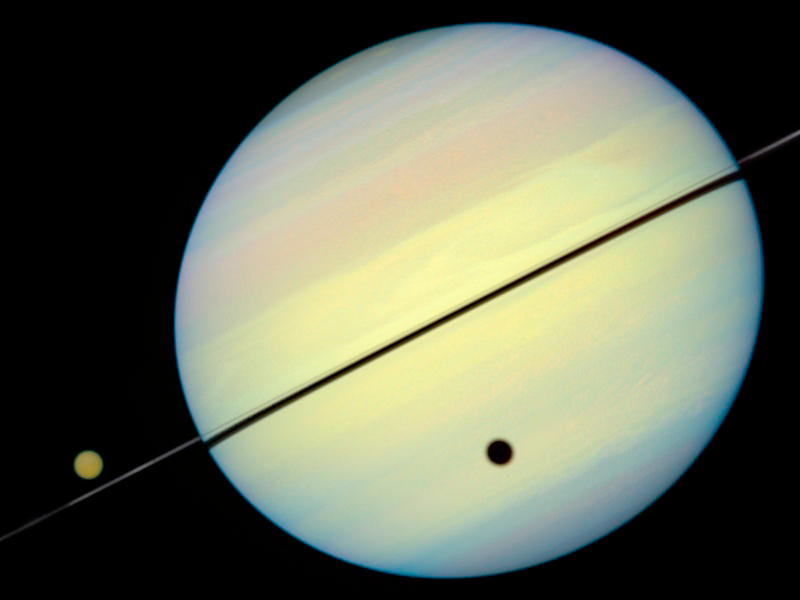

Hubble Catches Titan Chasing Its Shadow - Frame 3

This movie still shows Titan chasing its shadow across Saturn's disk. The still is from a movie created from images taken by NASA/ESA Hubble Space Telescope. It reveals the planet's rings tilted nearly edge-on toward the Earth, an event that occurs once every 15 years.

Credit: NASA/ESA and E. Karkoschka (University of Arizona)